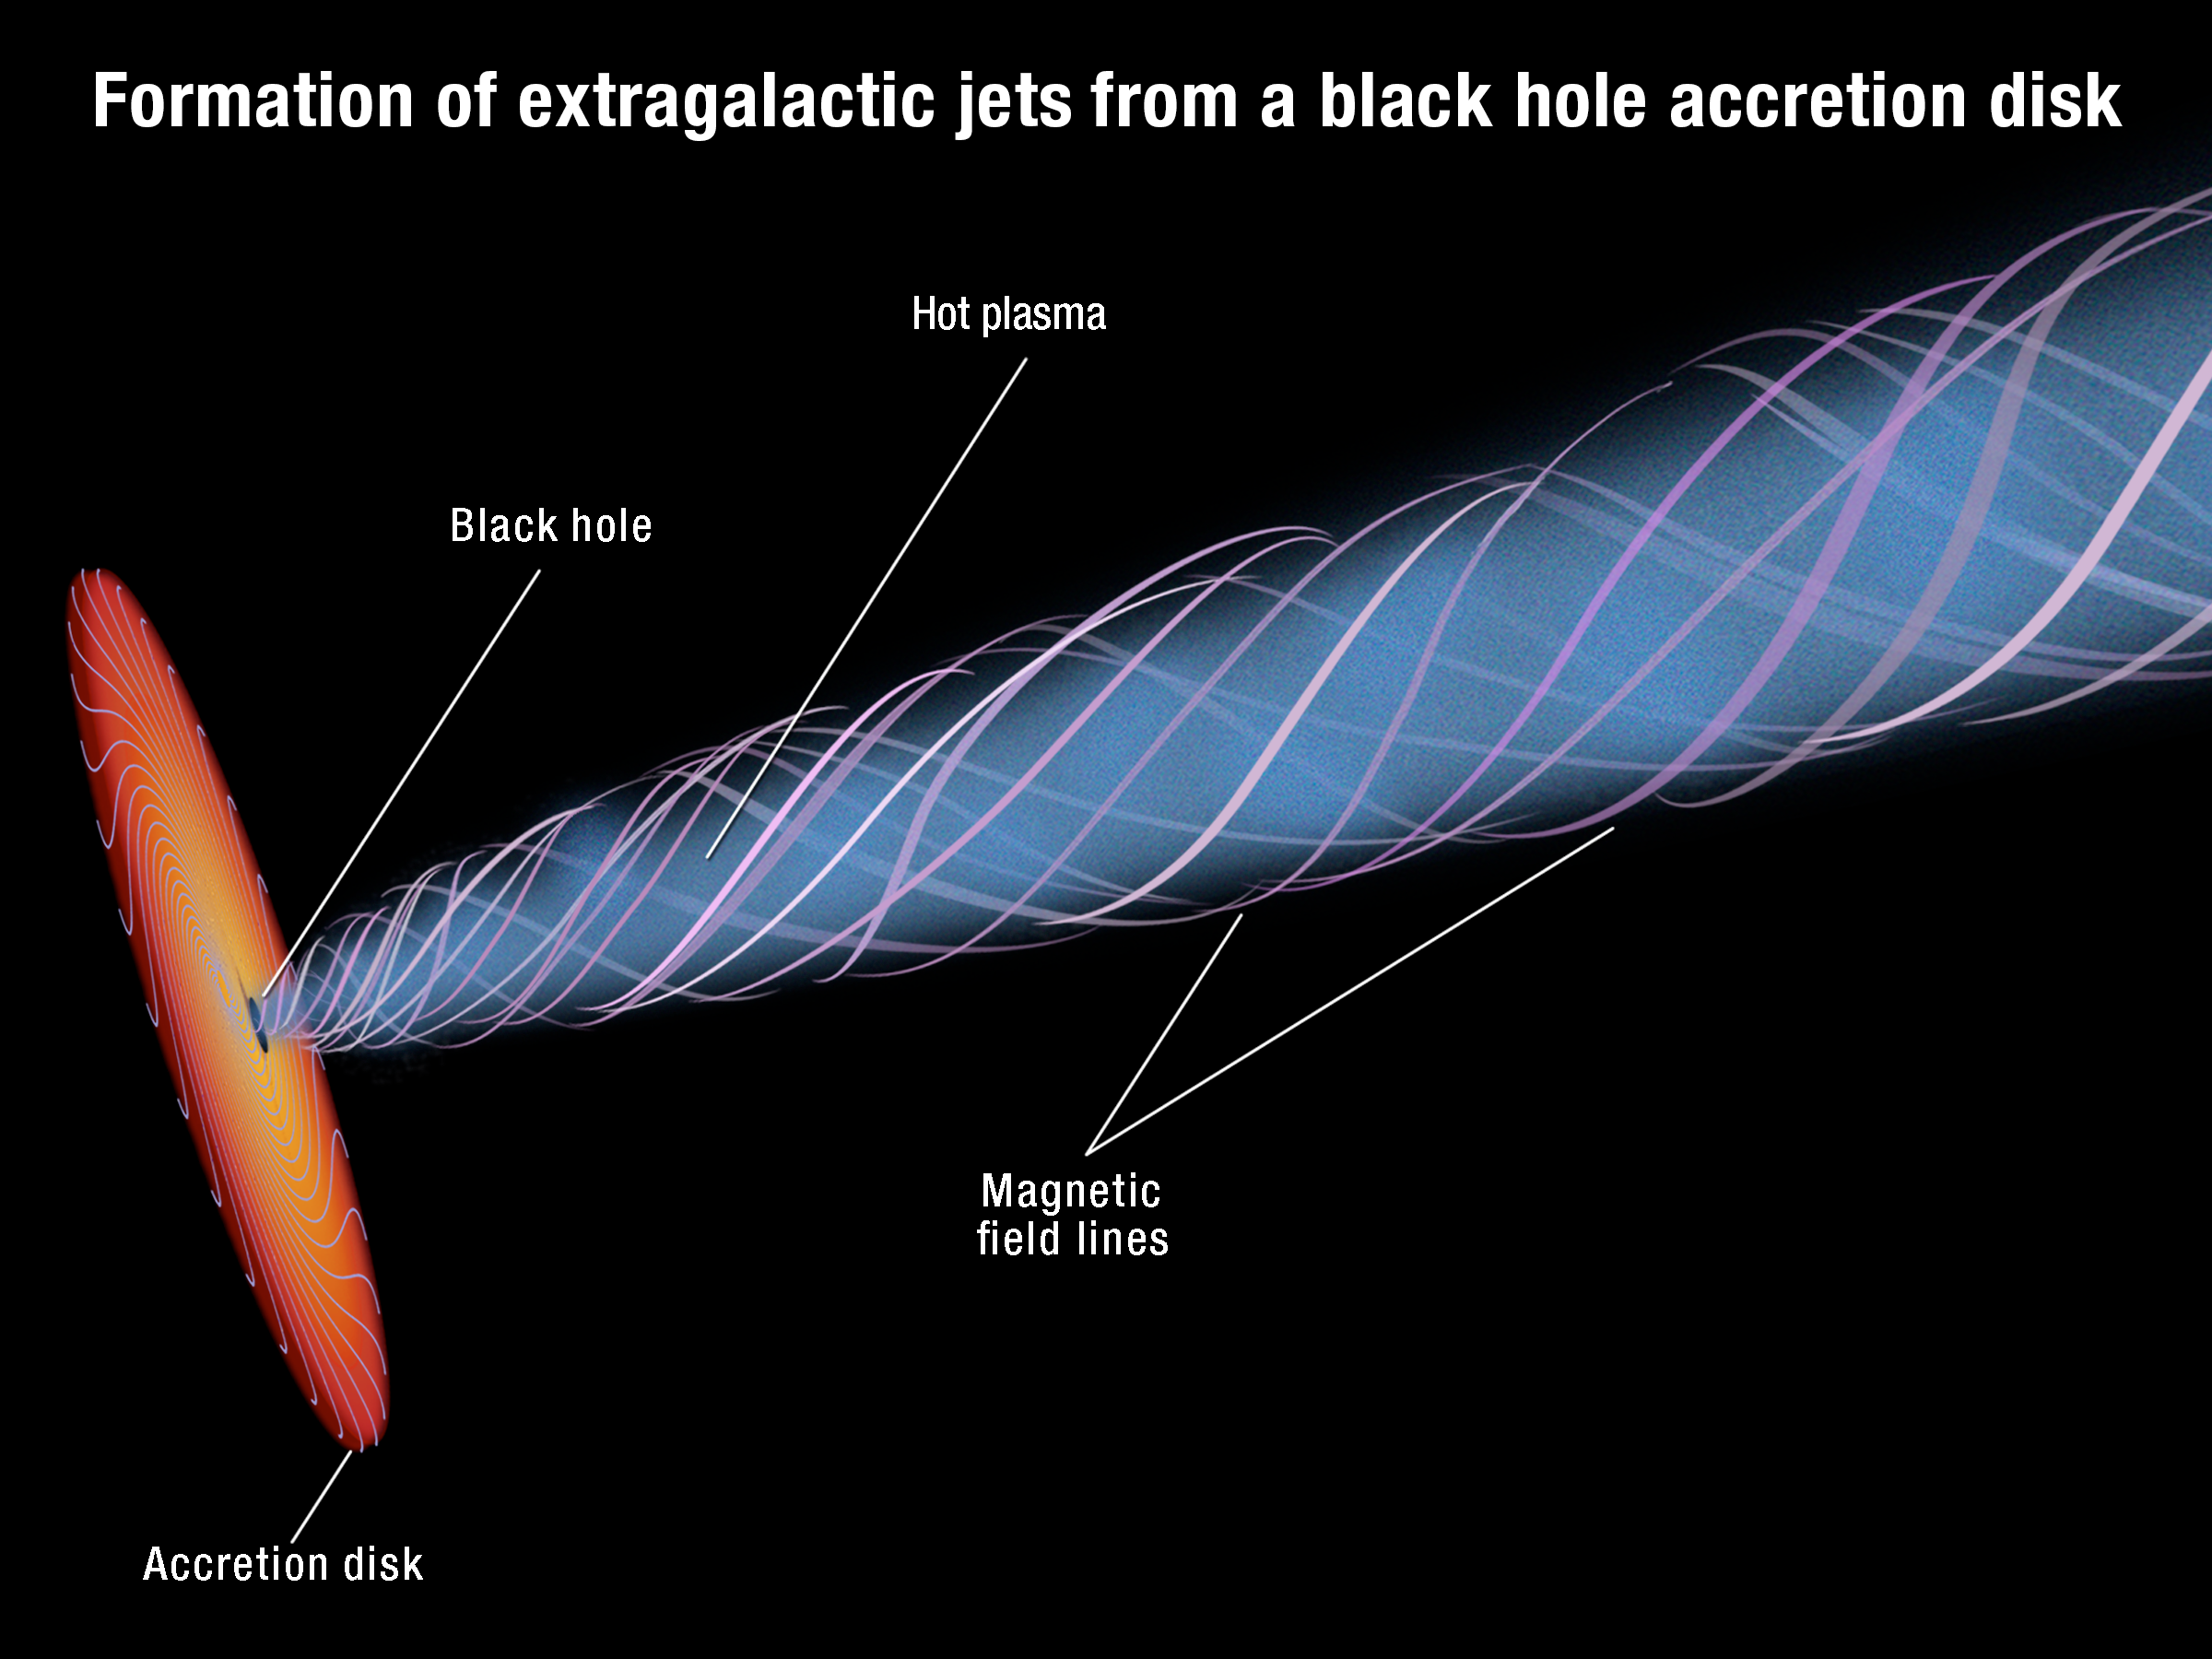

Magnetic funnel around a supermassive black hole

The accretion disc of hot plasma swirling around a supermassive black hole generates powerful magnetic fields. The disc's rotation twists the field into a funnel shape. These field lines constrict and direct the outflow of high-speed plasma from the black hole's vicinity. The result is a narrow, tapered, extragalactic jet.

Credit: NASA, ESA, and A. Feild (STScI)